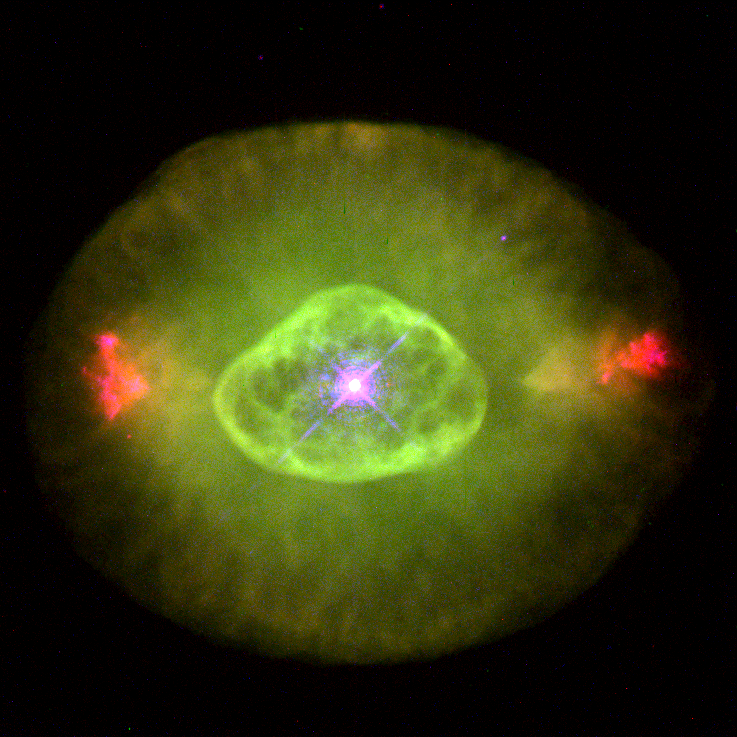

Hubble's planetary nebula gallery. A view of NGC 6826

NGC 6826's eye-like appearance is marred by two sets of blood-red 'fliers' that lie horizontally across the image. The surrounding faint green 'white' of the eye is believed to be gas that made up almost half of the star's mass for most of its life. The hot remnant star (in the centre of the green oval) drives a fast wind into older material, forming a hot interior bubble which pushes the older gas ahead of it to form a bright rim. (The star is one of the brightest stars in any planetary.) NGC 6826 is 2, 200 light- years away in the constellation Cygnus. The Hubble telescope observation was taken Jan. 27, 1996 with the Wide Field and Planetary Camera 2.

Credit: Bruce Balick (University of Washington), Jason Alexander (University of Washington), Arsen Hajian (U.S. Naval Observatory), Yervant Terzian (Cornell University), Mario Perinotto (University of Florence, Italy), Patrizio Patriarchi (Arcetri Observatory, Italy) and NASA/ESA